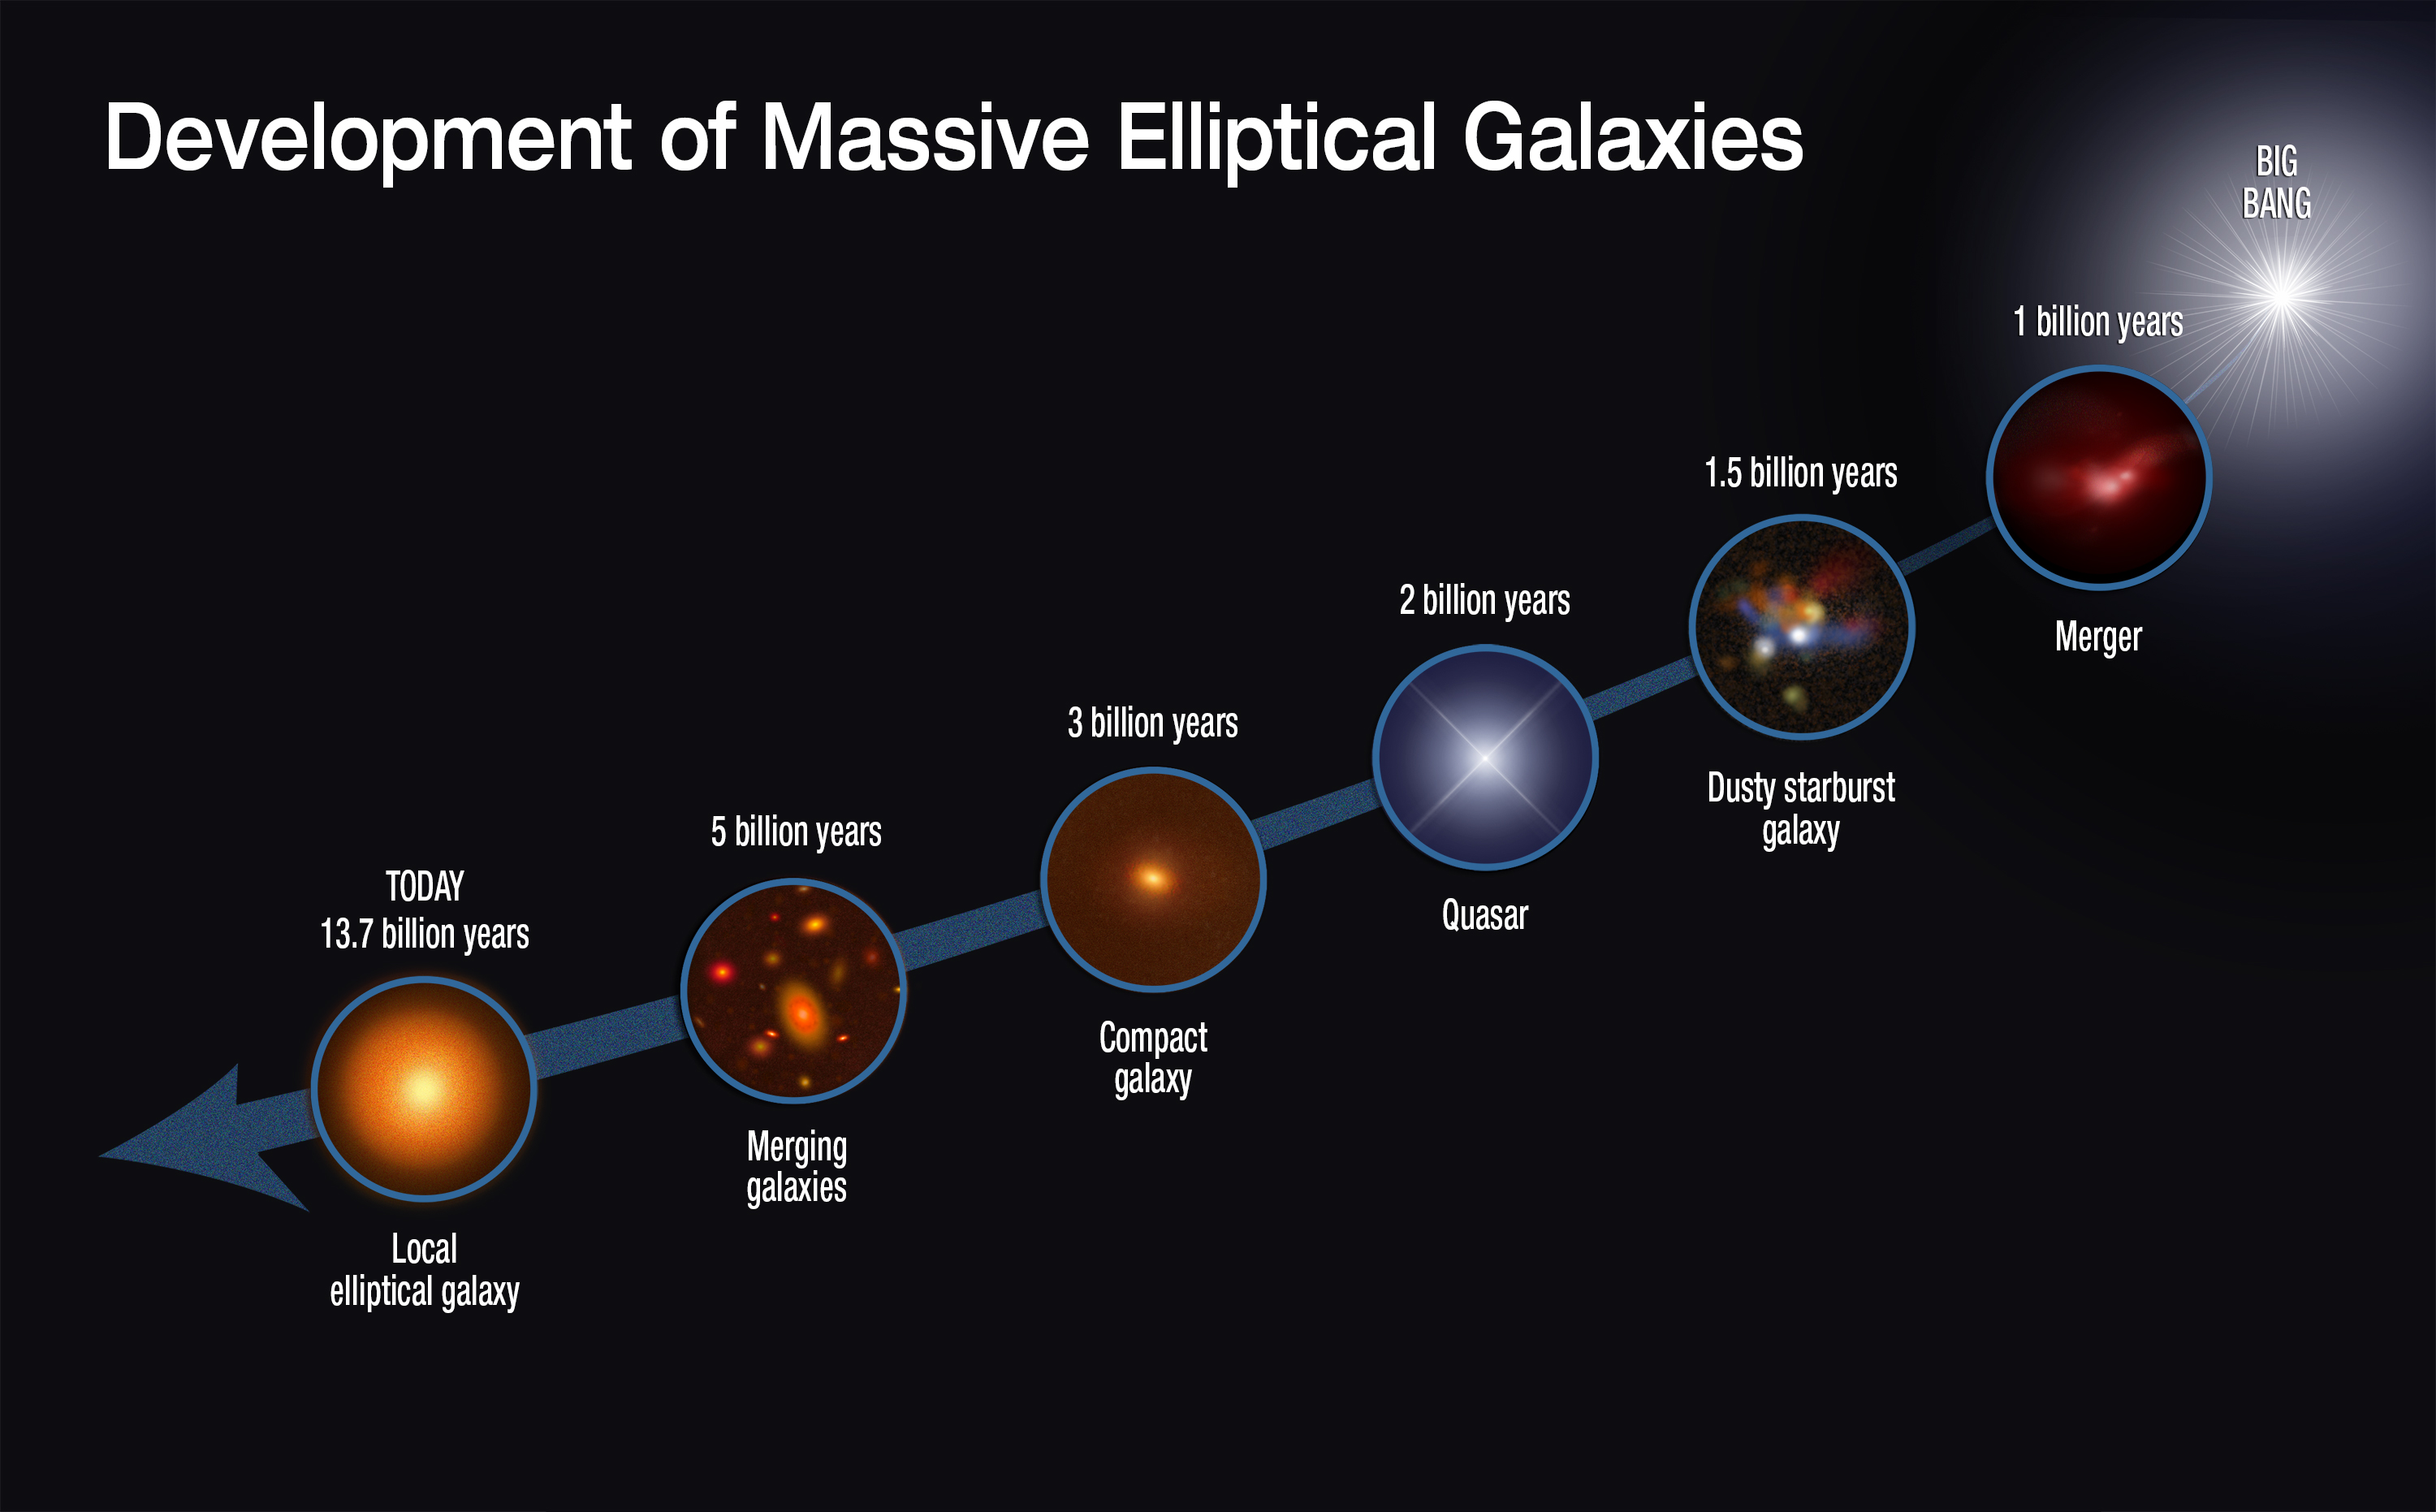

Development of massive elliptical galaxies

This graphic shows the evolutionary sequence in the growth of massive elliptical galaxies over 13 billion years, as gleaned from space-based and ground-based telescopic observations. The growth of this class of galaxies is quickly driven by rapid star formation and mergers with other galaxies.

Credit: NASA, ESA, and S. Toft (Niels Bohr Institute)
Illustration Credit: NASA, ESA, S. Toft (Niels Bohr Institute), and A. Feild (STScI)
Science Credit: NASA, ESA, S. Toft (Niels Bohr Institute), V. Smolcic (University of Zagreb), B. Magnelli (Argelander Institute for Astronomy), A. Karim (Argelander Institute for Astronomy and Durham University), A. Zirm (Niels Bohr Institute), M. Michalowski (University of Edinburgh and Universiteit Gent), P. Capak (California Institute of Technology), K. Sheth (National Radio Astronomy Observatory), K. Schawinski (ETH Zurich), J.-K. Krogager (Niels Bohr Institute and European Southern Observatory), S. Wuyts (Max Planck Institute for Extraterrestrial Physics), D. Sanders (University of Hawaii), A. Man (Niels Bohr Institute), D. Lutz (Max Planck Institute for Extraterrestrial Physics), J. Staguhn (NASA Goddard Space Flight Center and Johns Hopkins University), S. Berta (Max Planck Institute for Extraterrestrial Physics), H. McCracken (Institut d'Astrophysique de Paris), J. Krpan (University of Zagreb), D. Riechers (Cornell University and California Institute of Technology), and G. Brammer (European Southern Observatory and STScI)